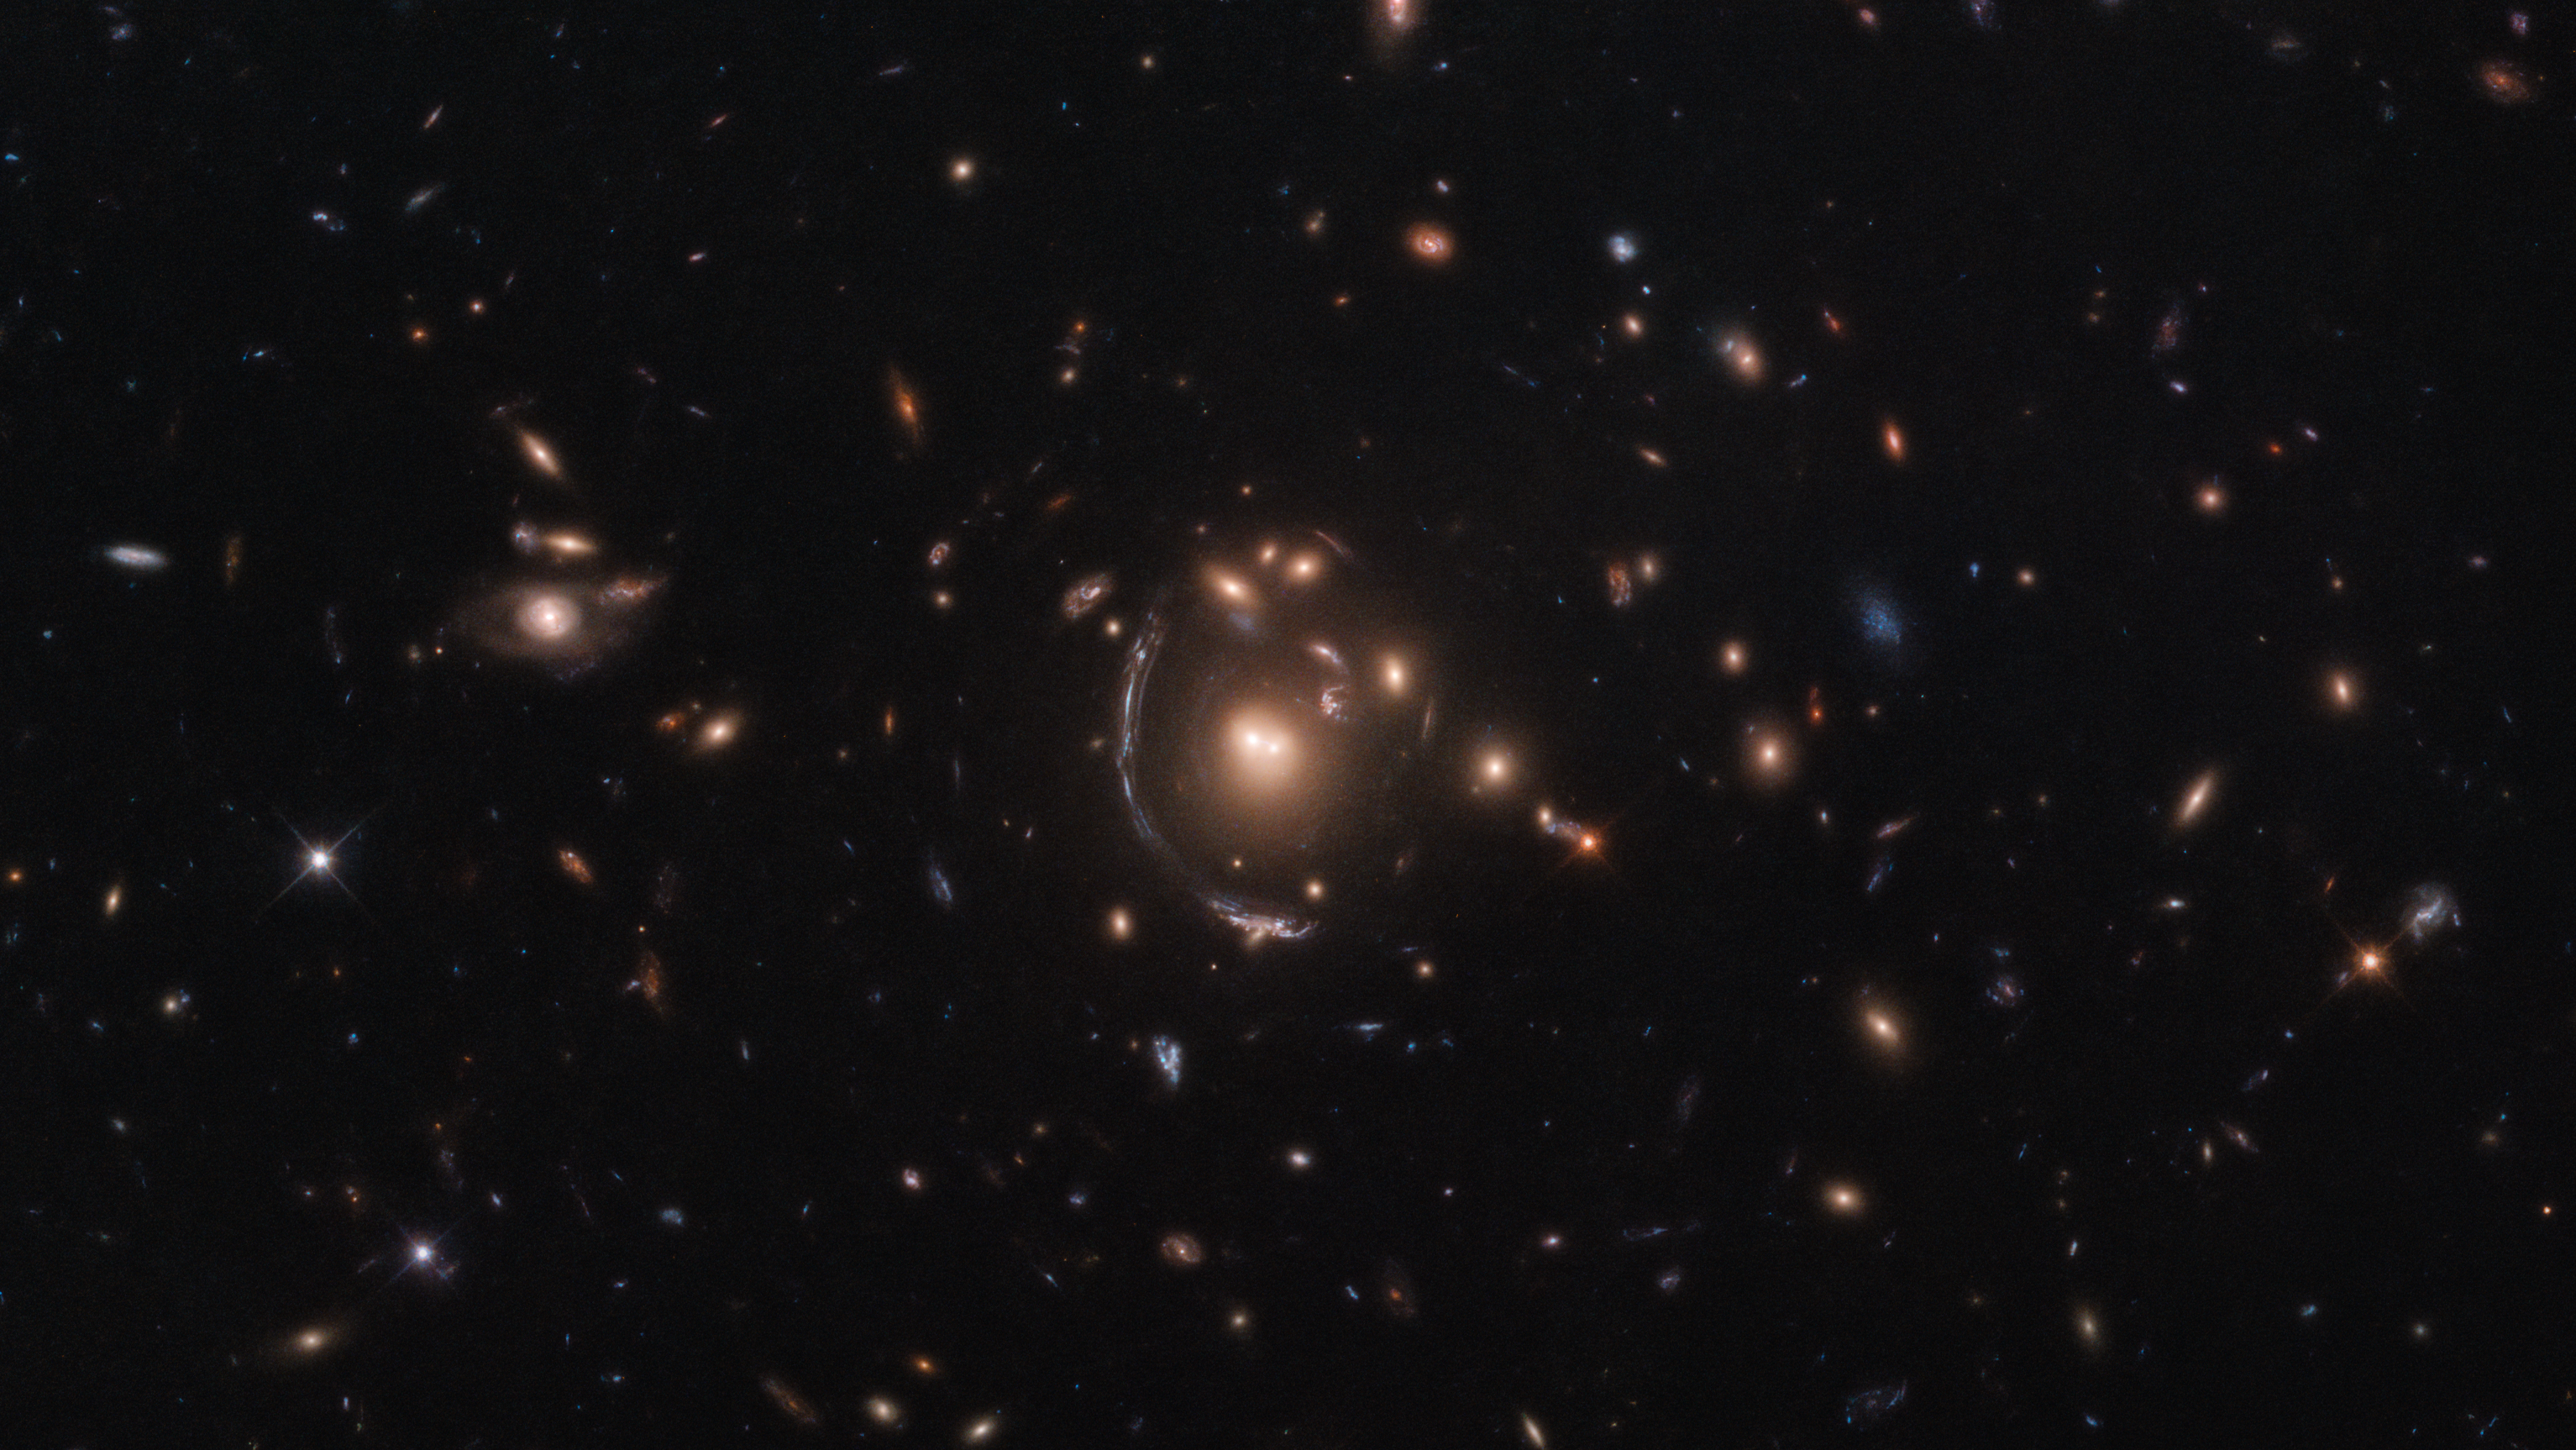

Contorting Giants

This NASA/ESA Hubble Space Telescope image features the galaxy LRG-3-817, also known as SDSS J090122.37+181432.3. The galaxy, its image distorted by the effects of gravitational lensing, appears as a long arc to the left of the central galaxy cluster.

Gravitational lensing occurs when a large distribution of matter, such as a galaxy cluster, sits between Earth and a distant light source. As space is warped by massive objects, the light from the distant object bends as it travels to us and we see a distorted image of it. This effect was first predicted by Einstein’s general theory of relativity.

Strong gravitational lenses provide an opportunity for studying properties of distant galaxies, since Hubble can resolve details within the multiple arcs that are one of the main results of gravitational lensing. An important consequence of lensing distortion is magnification, allowing us to observe objects that would otherwise be too far away and too faint to be seen. Hubble makes use of this magnification effect to study objects beyond the sensitivity of its 2.4-metre-diameter primary mirror, showing us the most distant galaxies humanity has ever encountered.

This lensed galaxy was found as part of the Sloan Bright Arcs Survey, which discovered some of the brightest gravitationally lensed high-redshift galaxies in the night sky.

Credit: ESA/Hubble & NASA, S. Allam et al.